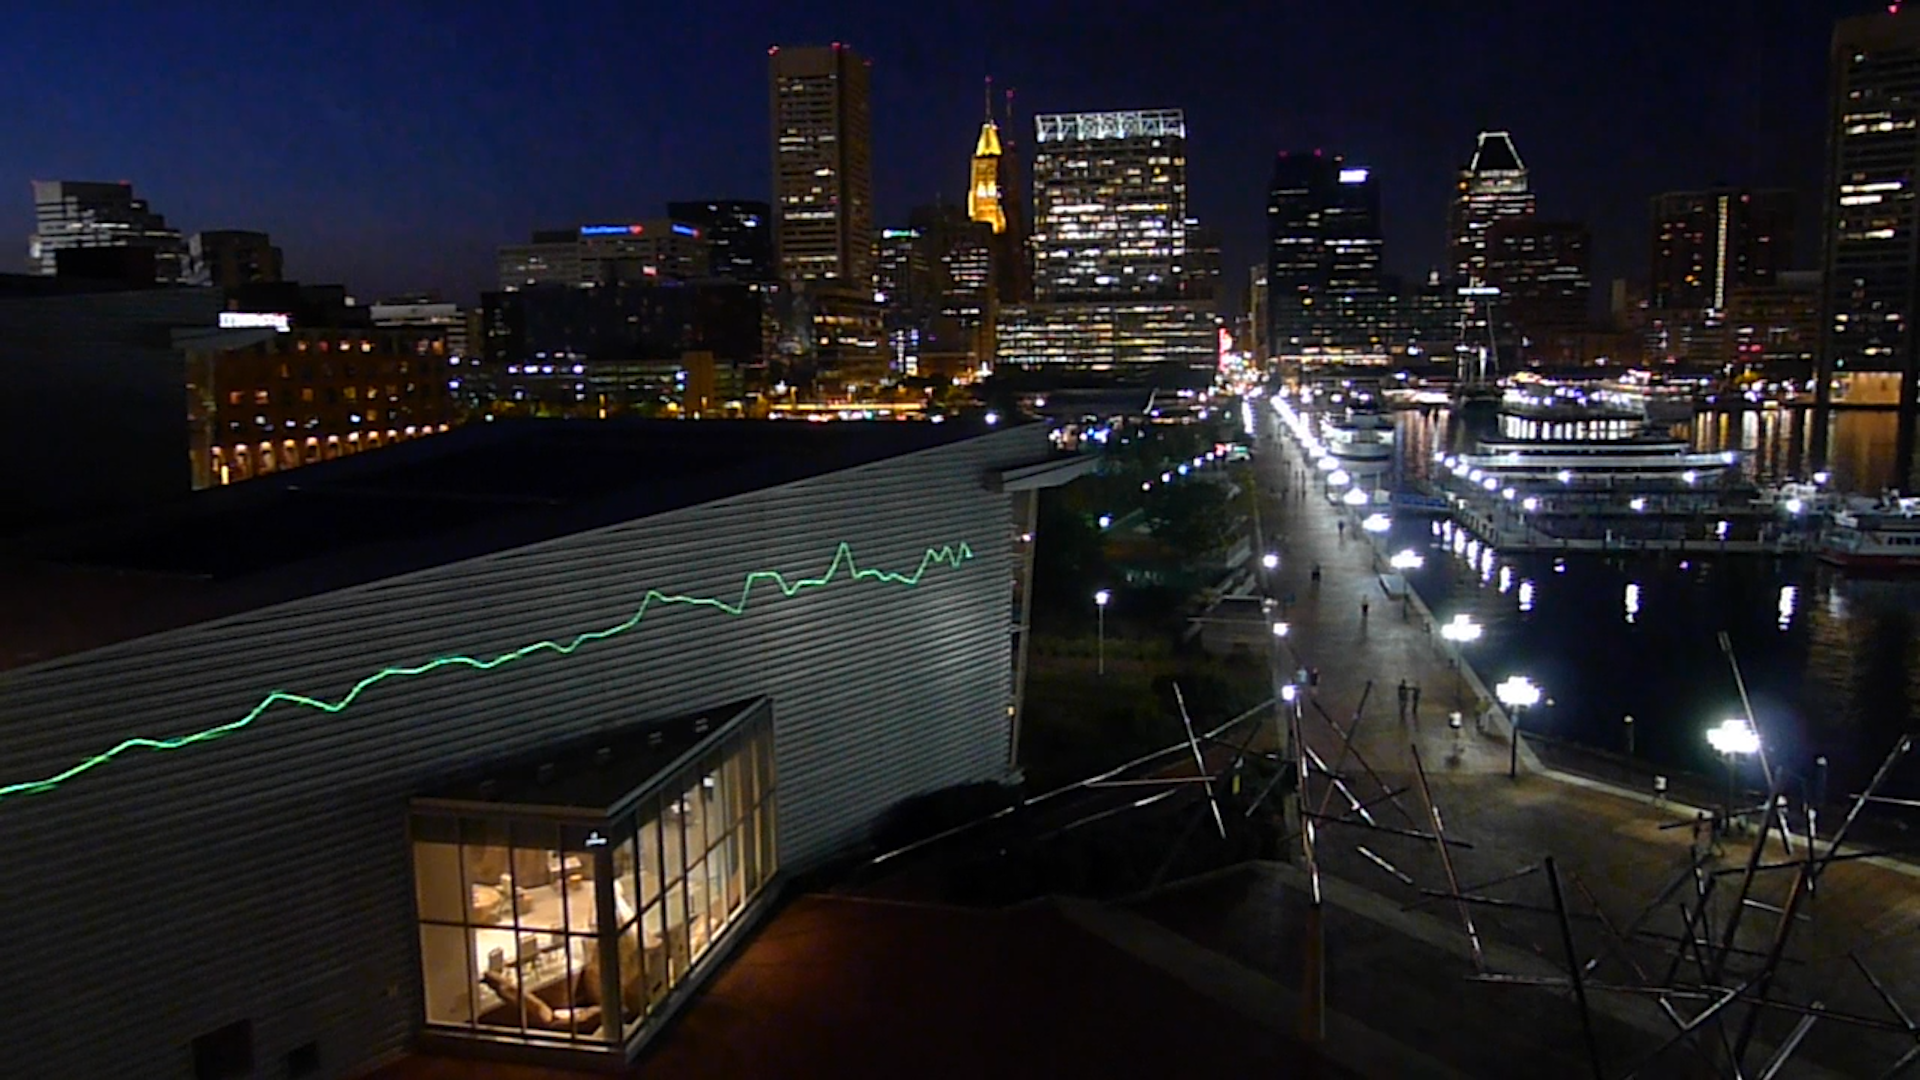

Screenshot of Hubblecast 63

Watch the video here.

Credit: NASA & ESA